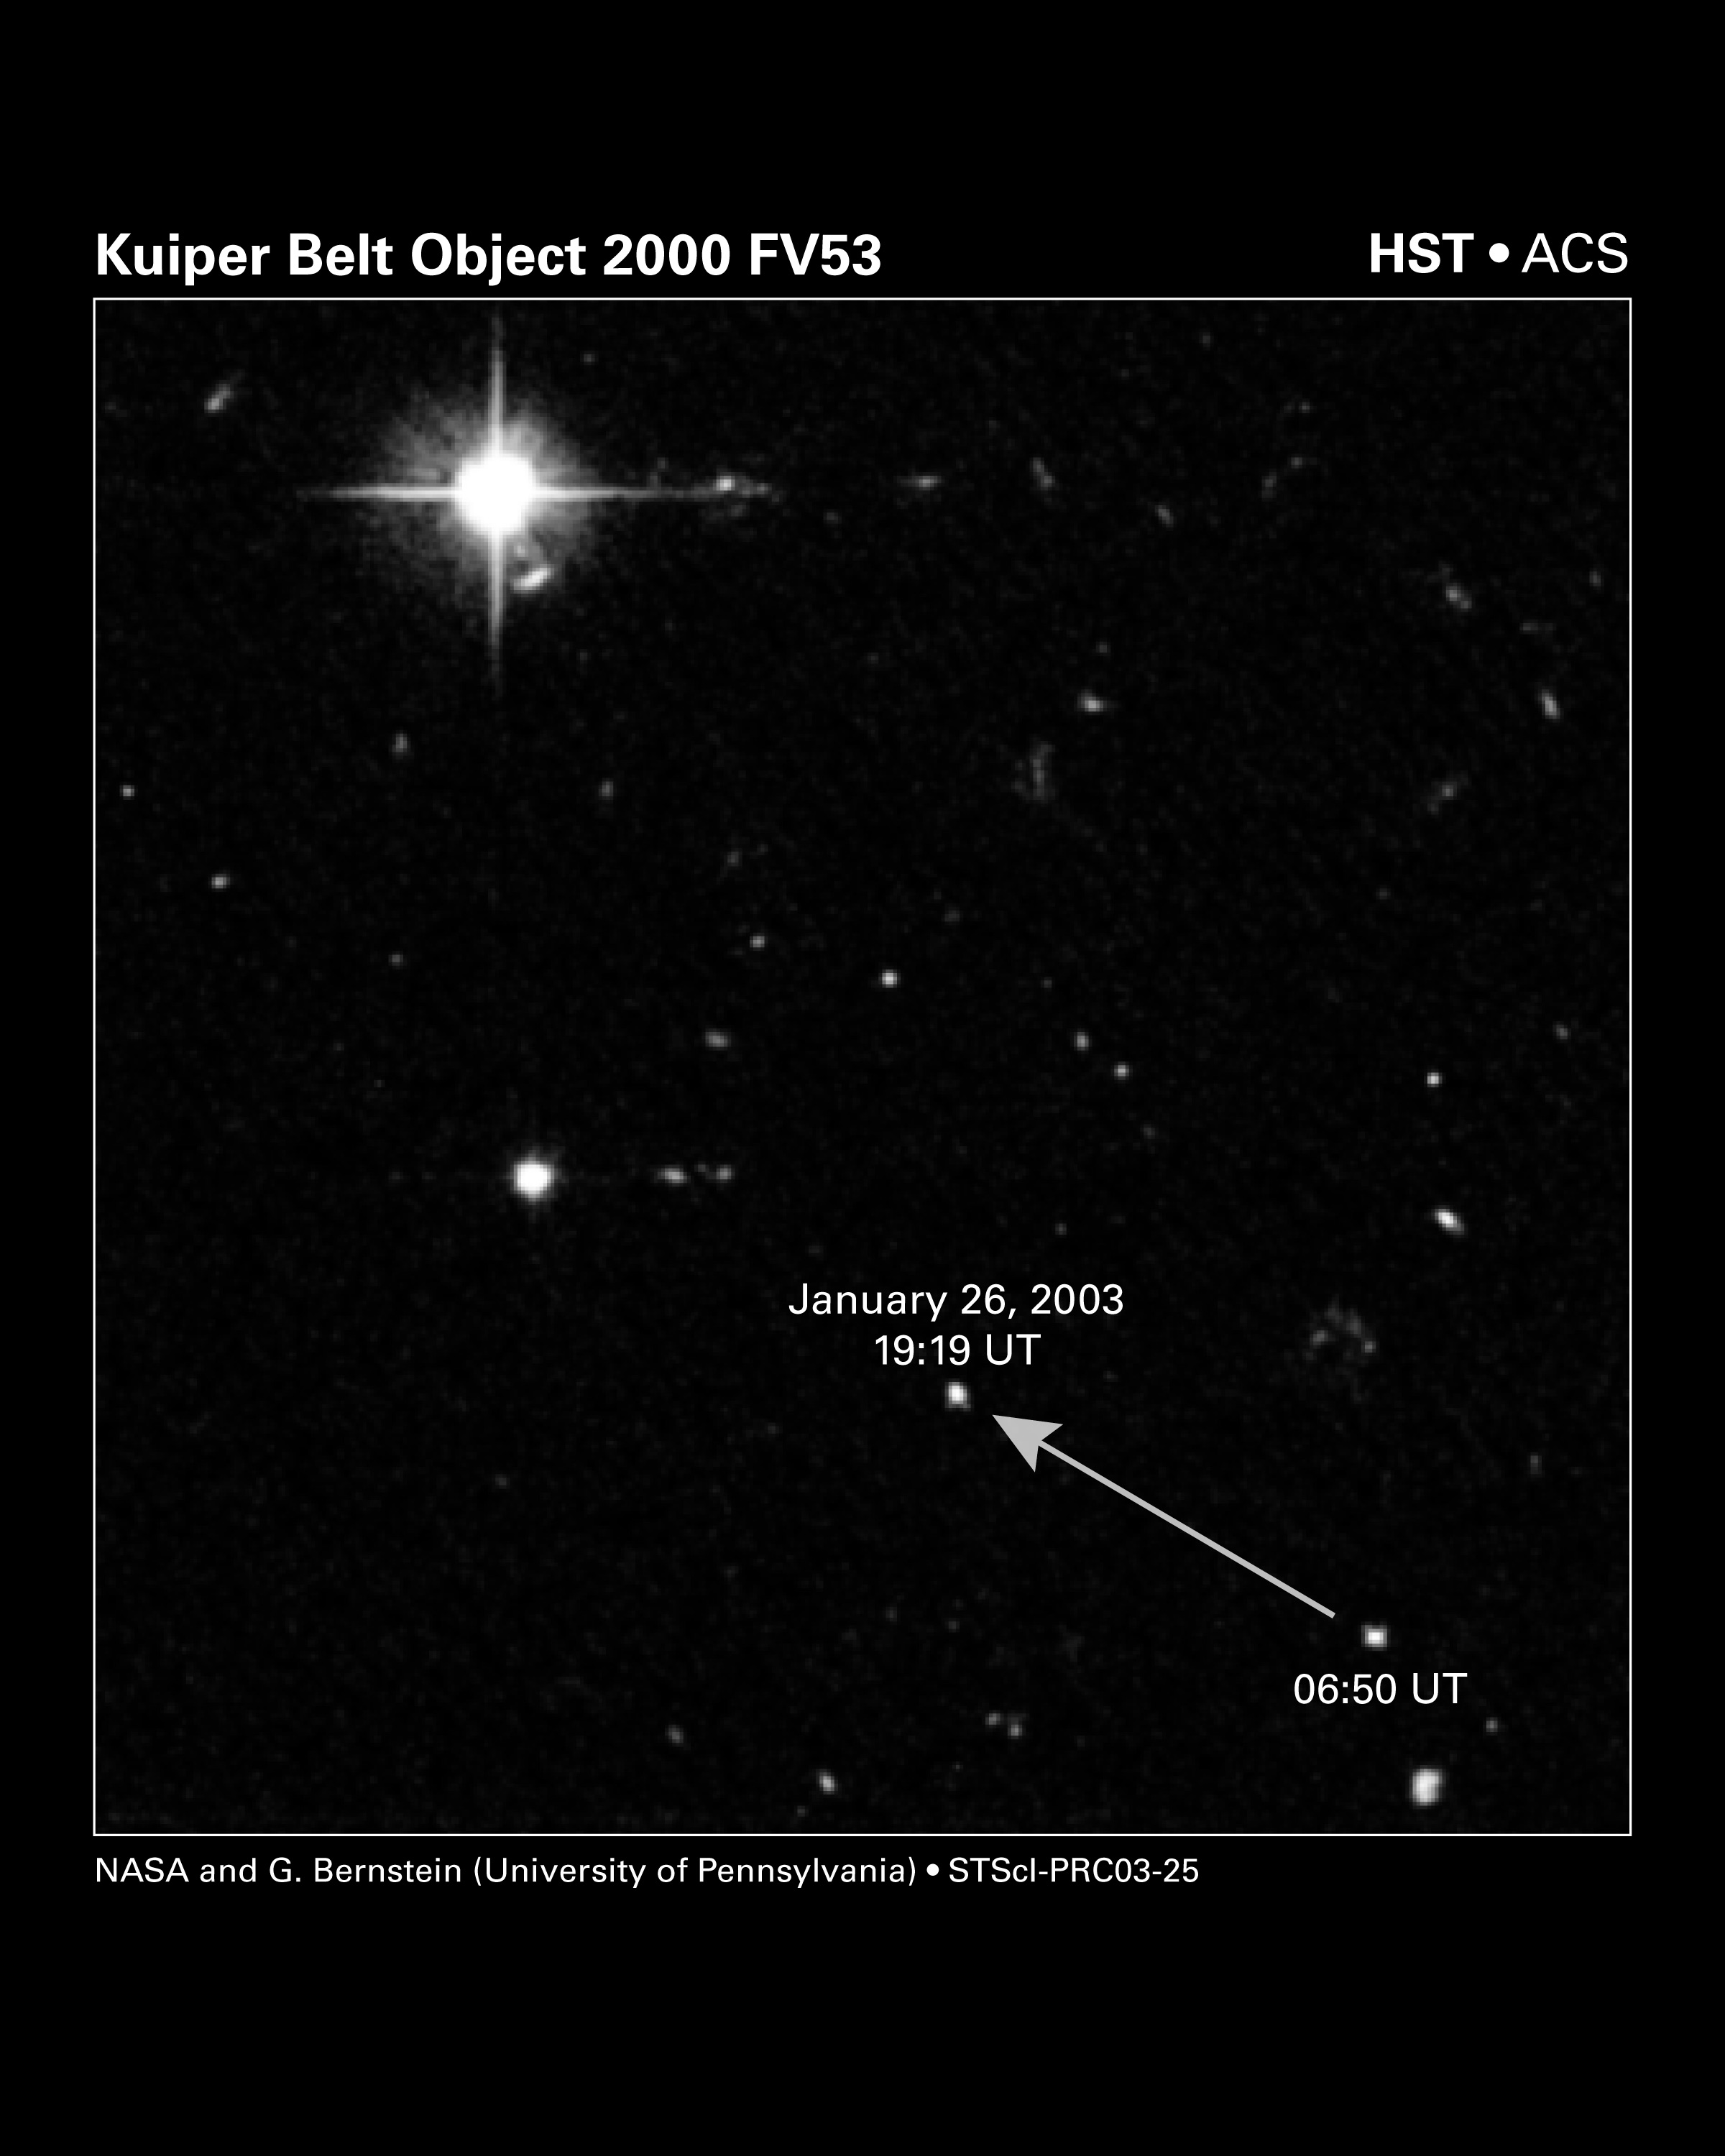

Kuiper Belt Object 2000 FV53

Two snapshots, taken 12 hours apart, were combined to produce this Hubble Space Telescope image of a Kuiper Belt object (named 2000 FV53) moving across the sky. Hubble's Advanced Camera for Surveys tracked the object on Jan. 26, 2003. Like all the planets, this solar-system member appears to move relative to the fixed stars and galaxies in the background. This particular object was discovered from Hawaii in March 2000 and used to help target the Hubble observations. The three new Kuiper Belt members discovered by Hubble are up to 100 times fainter than this one. In fact, the objects are so faint that they cannot be seen by the human eye. Astronomers used computer analysis to find them. This image spans about 0.04 percent of the area of the full moon (less than 0.01 degree of the sky, about 0.04 percent of the area of the full moon. Astronomers used Hubble to search an area 250 times arger than shown in this image, discovering three new solar system "fossils" as small as 15 miles (25 km) across.

Credit: NASA/ESA, G. Bernstein and D. Trilling (University of Pennsylvania)